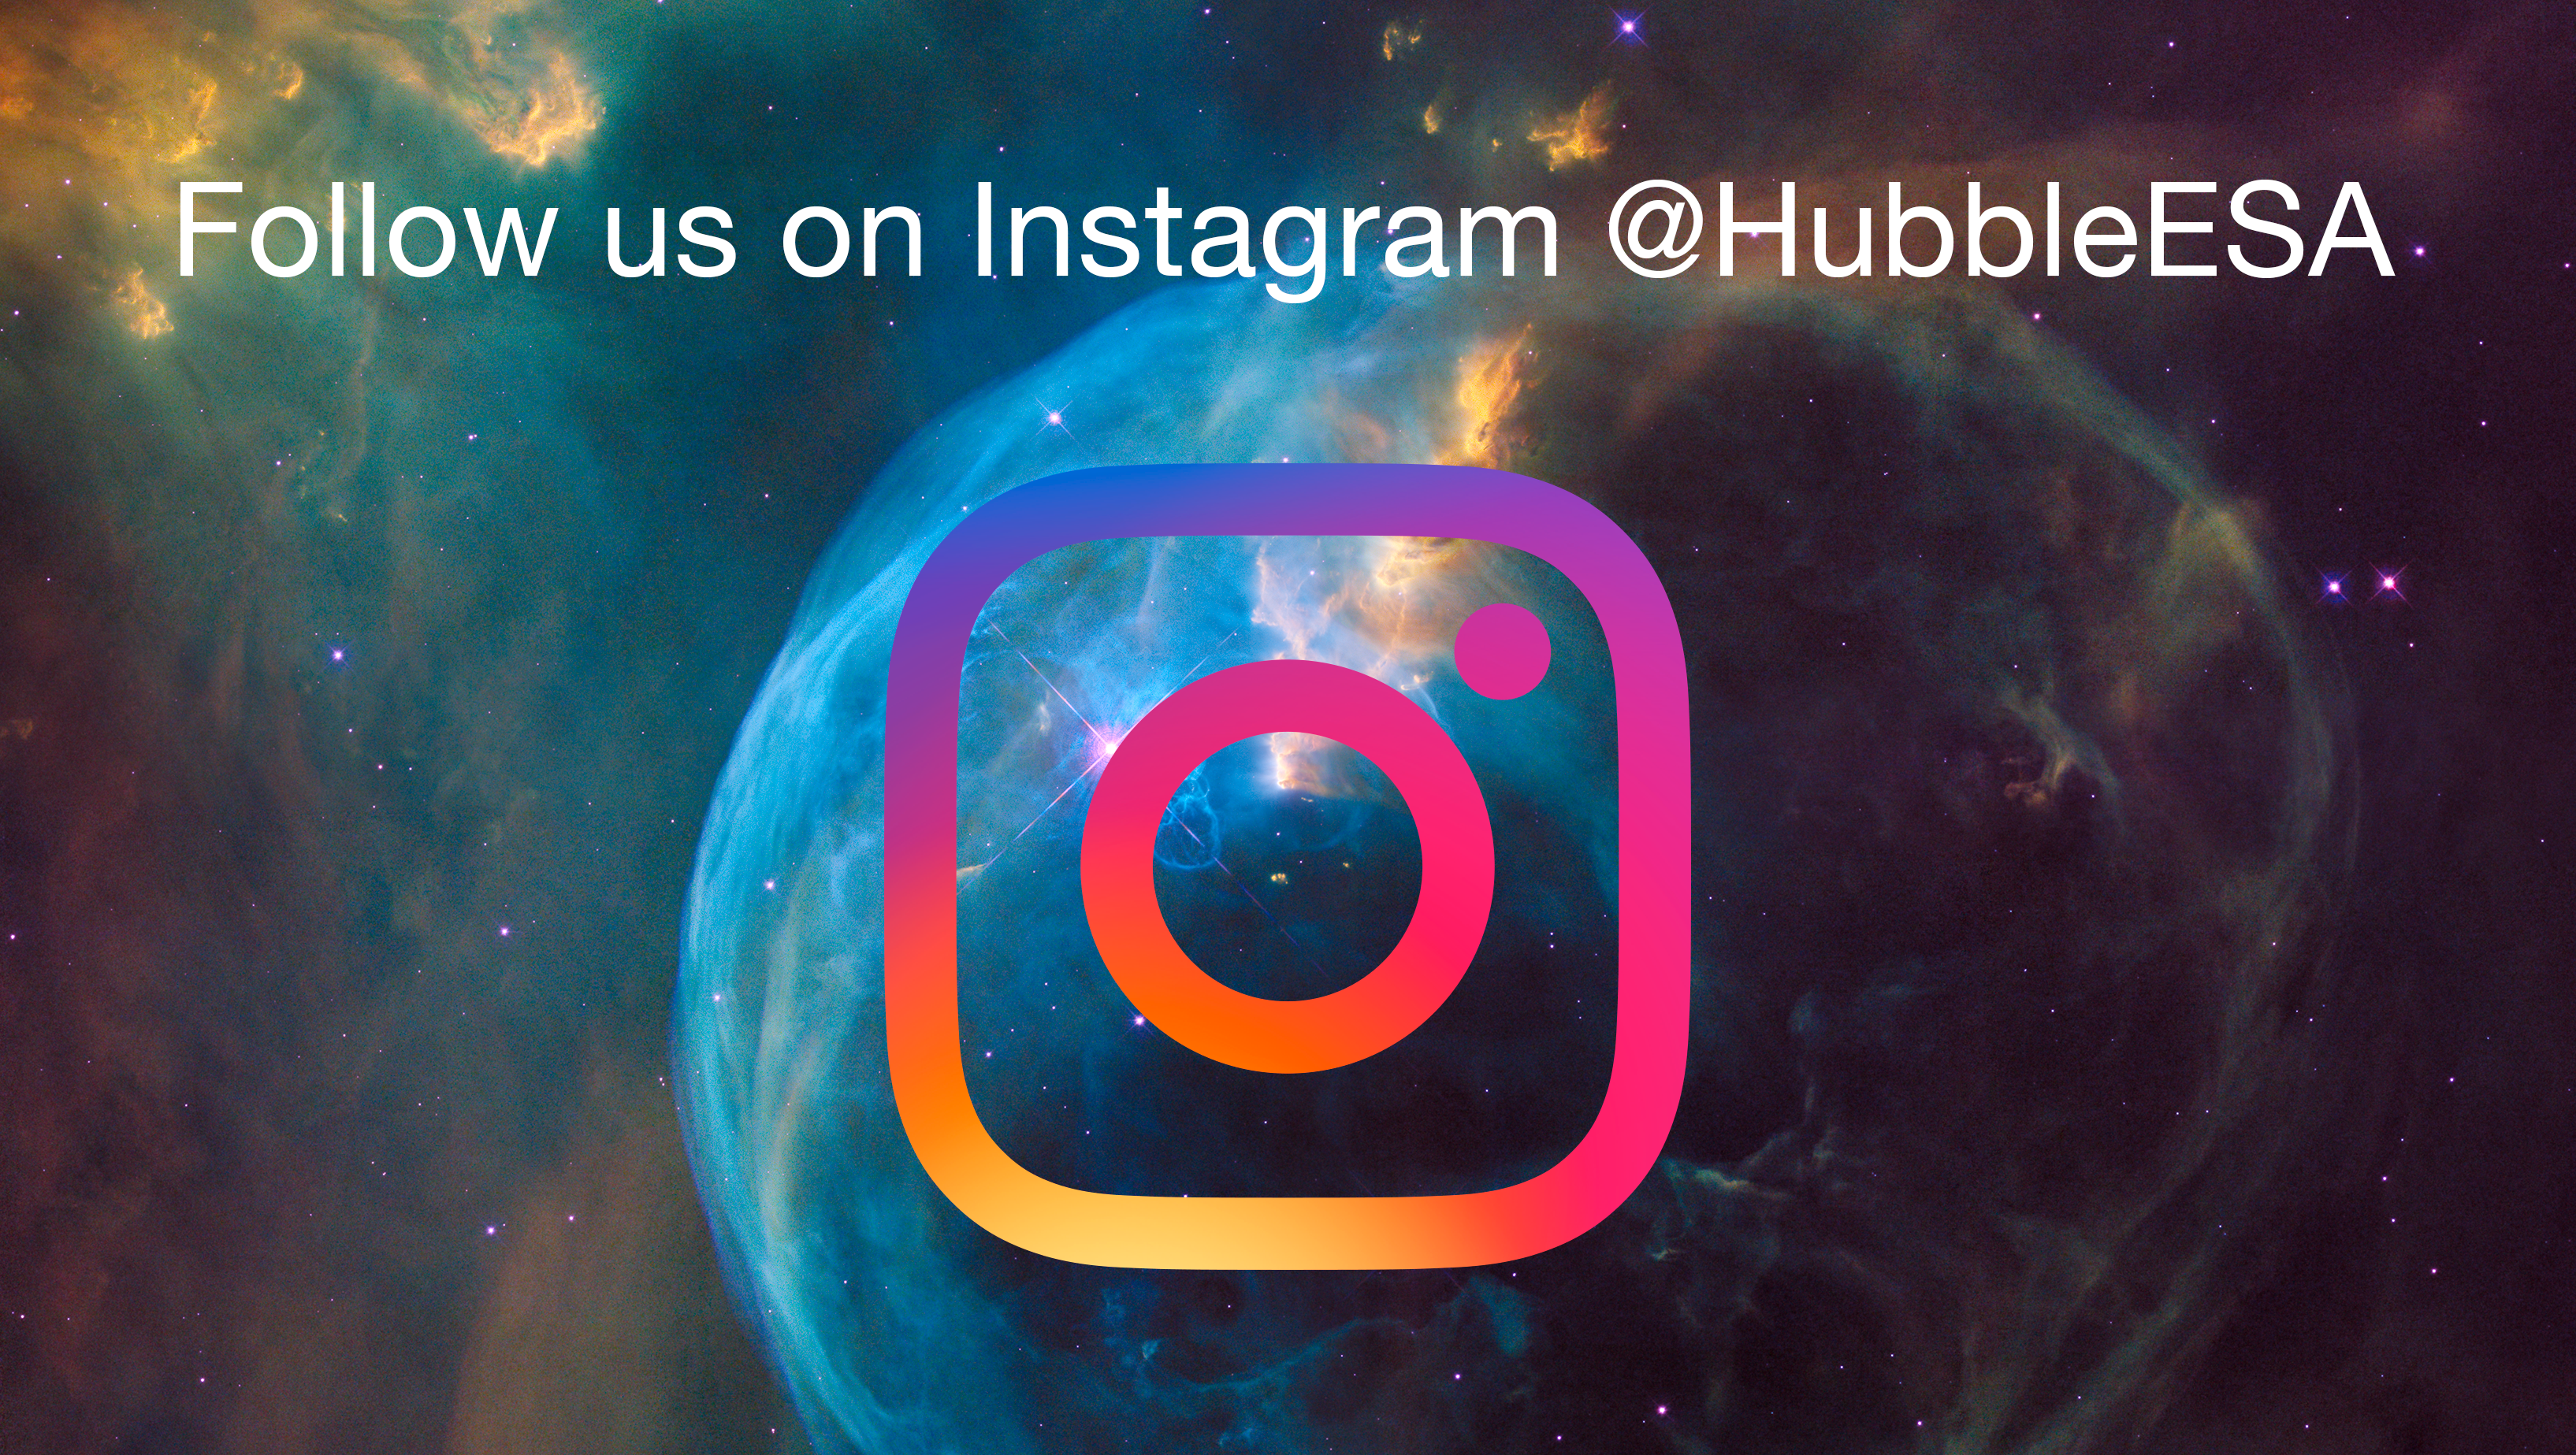

ESA/Hubble on Instagram

A selection from the NASA/ESA Hubble Space Telescope’s archive of more than 4500 images will be released on Instagram, as ESA/Hubble joins the popular social media channel. We invite you to follow ESA/Hubble @HubbleESA

Credit: ESA/Hubble